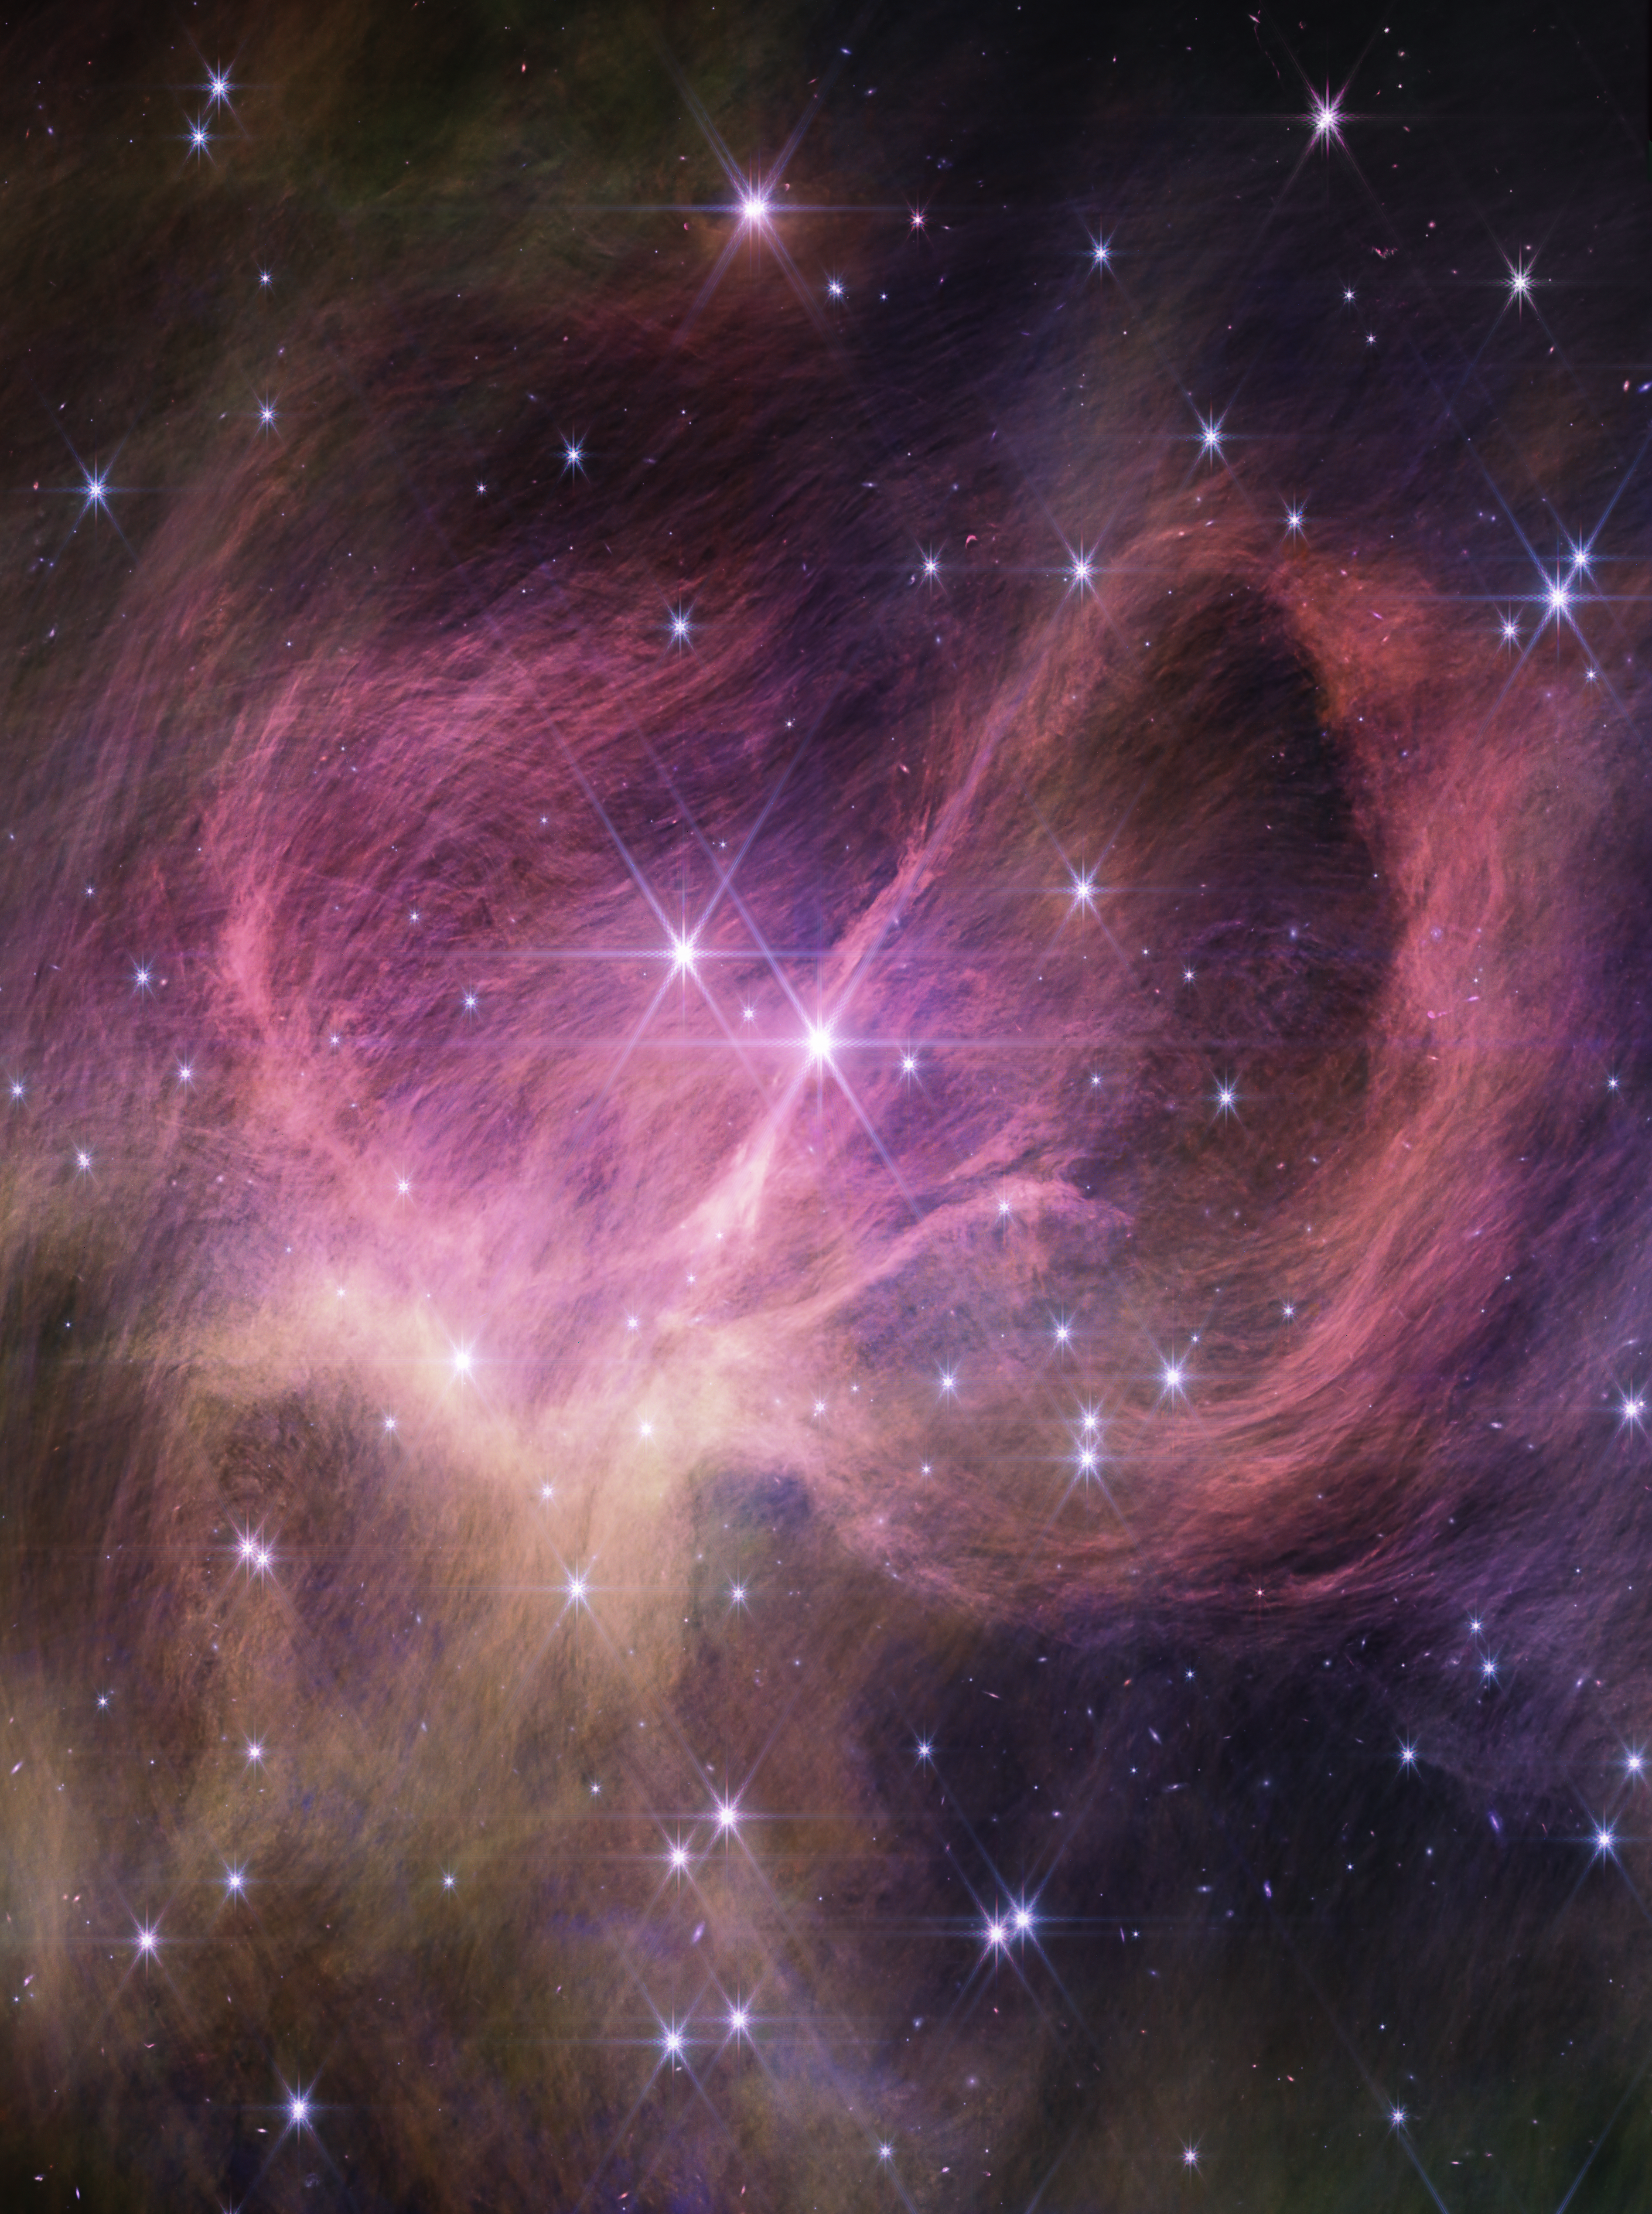

Star Cluster IC 348 (NIRCam image)

This image from the NIRCam (Near-Infrared Camera) instrument on the NASA/ESA/CSA James Webb Space Telescope shows the central portion of the star cluster IC 348. Astronomers combed the cluster in search of tiny, free-floating brown dwarfs: objects too small to be stars but larger than most planets. They found three brown dwarfs that are less than eight times the mass of Jupiter. The smallest weighs just three to four times as much as Jupiter, challenging theories for star formation.

The wispy curtains filling the image are interstellar material reflecting the light from the cluster’s stars — what is known as a reflection nebula. The material also includes carbon-containing molecules known as polycyclic aromatic hydrocarbons, or PAHs. The bright star closest to the centre of the frame is actually a pair of type B stars in a binary system, the most massive stars in the cluster. Winds from these stars may help sculpt the large loop seen on the right side of the field of view.

Credit: NASA, ESA, CSA, STScI, and K. Luhman (Penn State University) and C. Alves de Oliveira (European Space Agency)